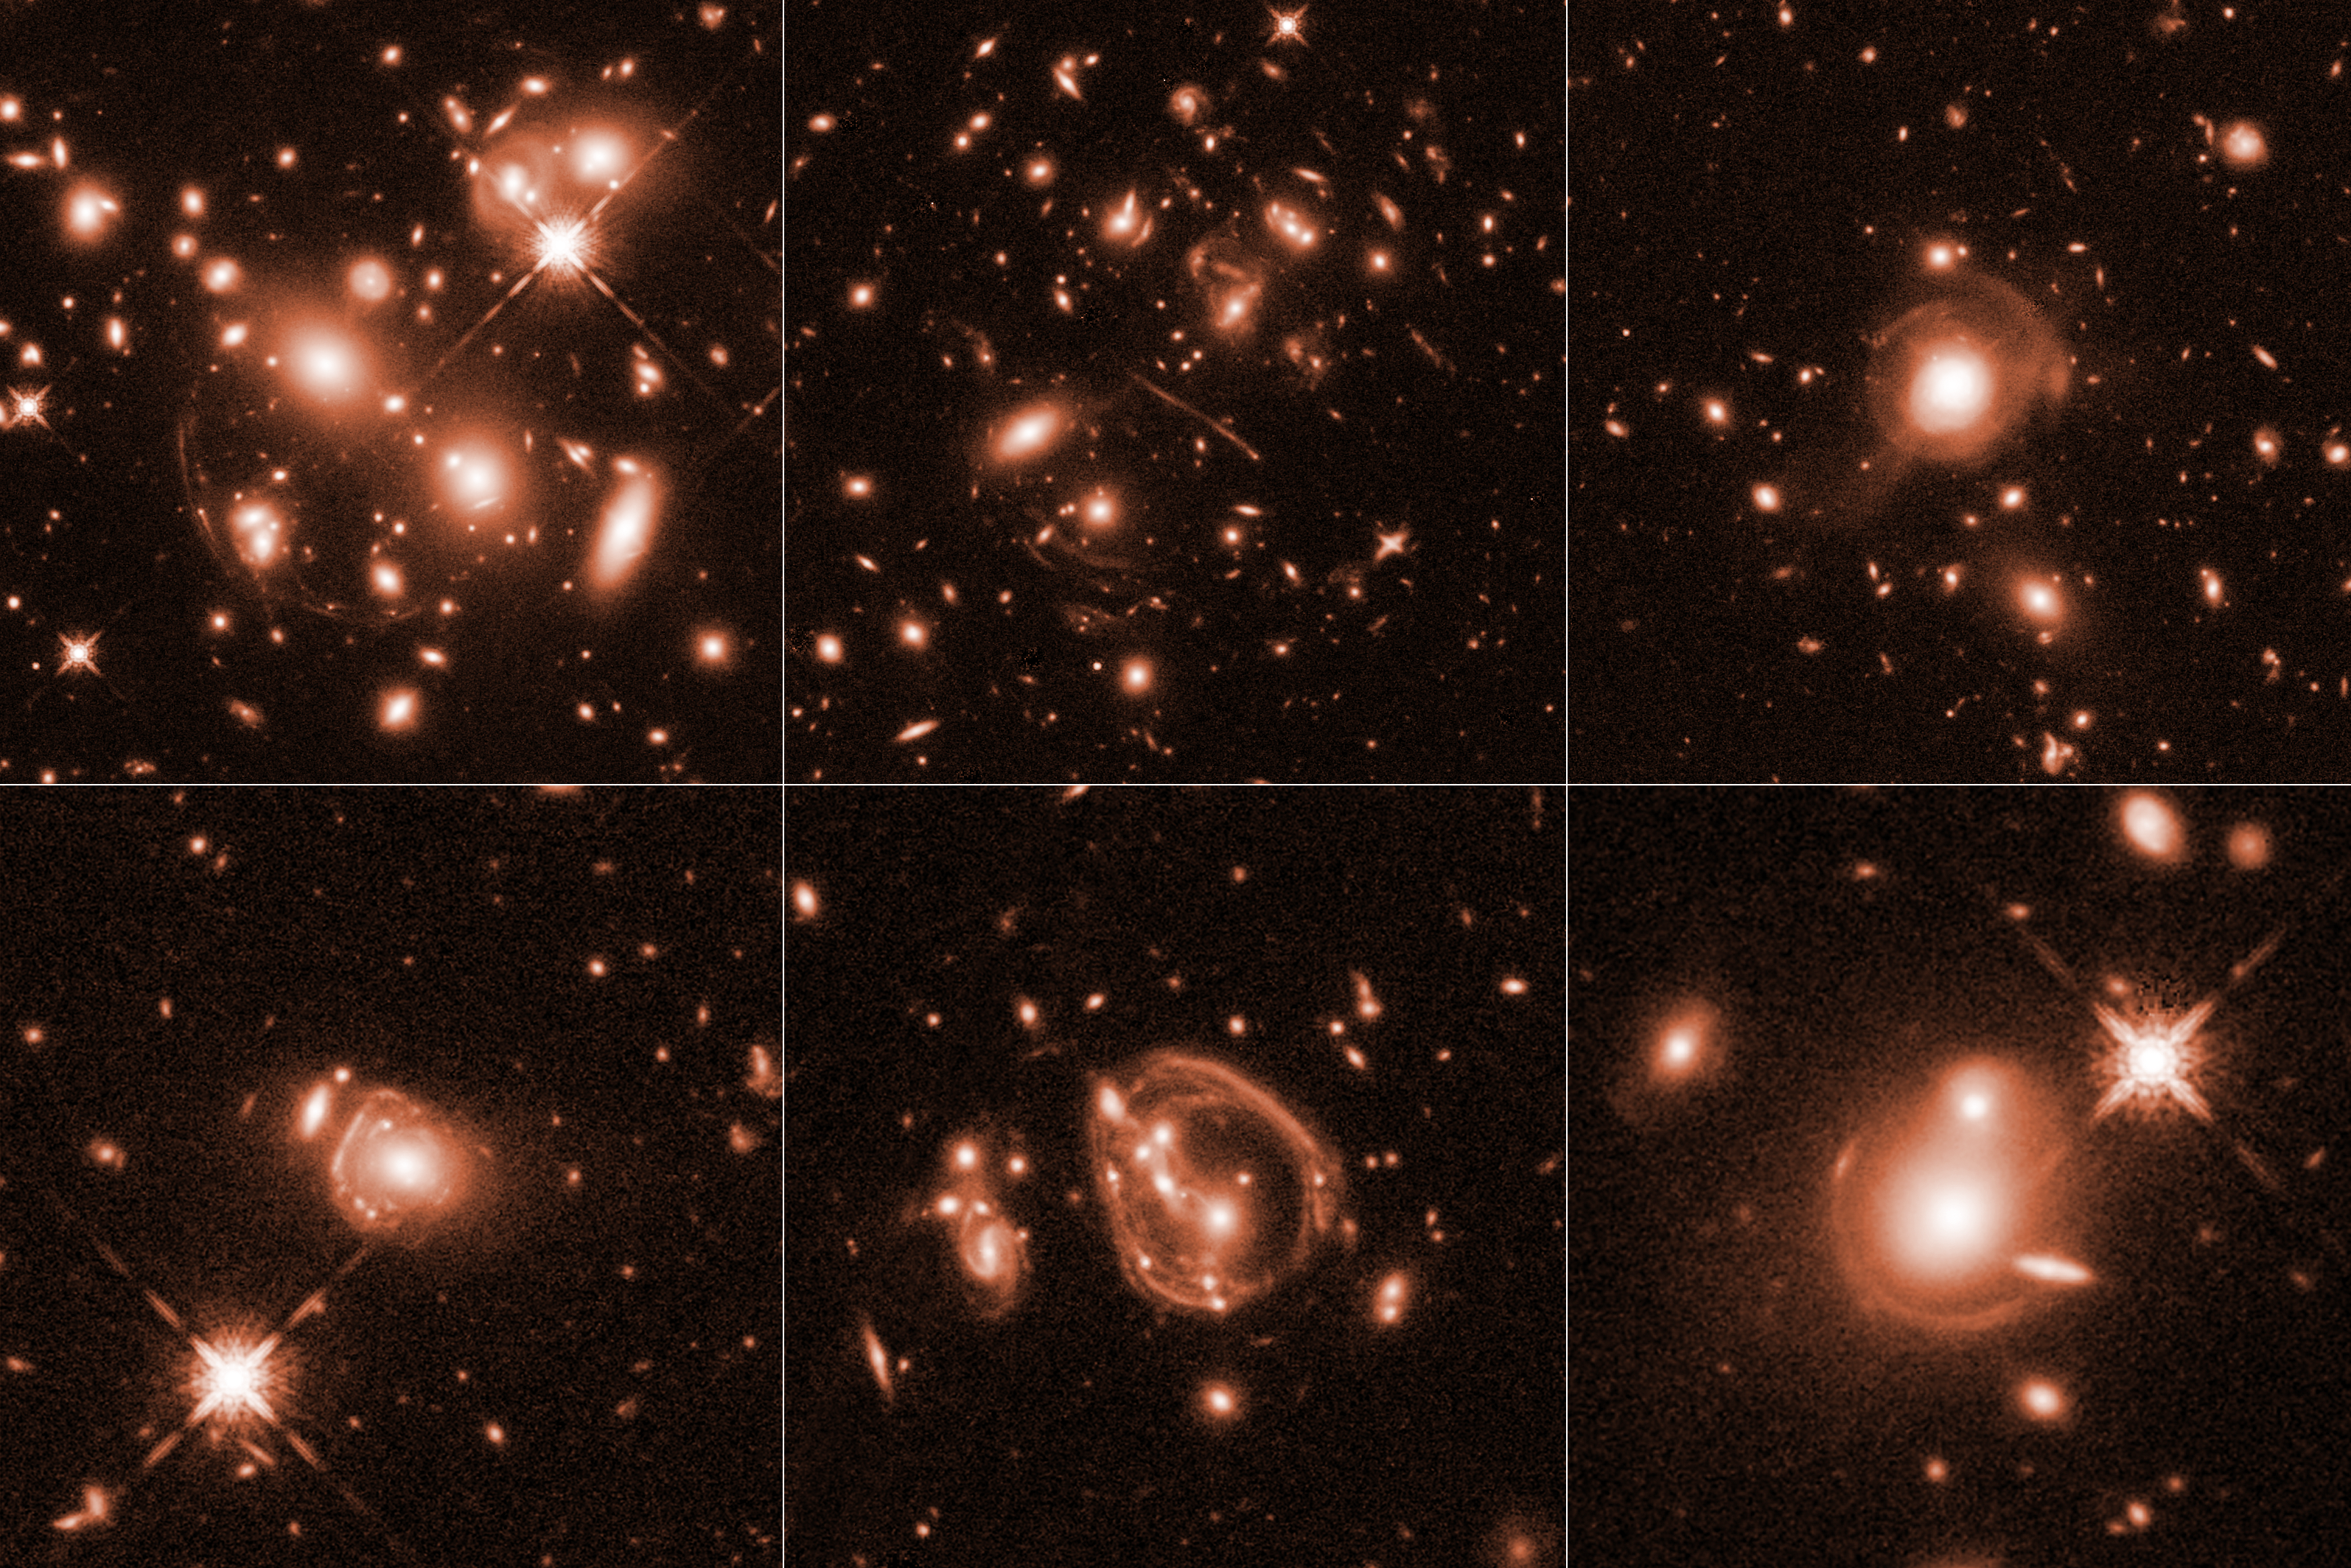

Hubble captures gallery of ultra-bright galaxies

These six images, taken by the NASA/ESA Hubble Space Telescope, reveal a jumble of misshapen-looking galaxies punctuated by exotic patterns such as arcs, streaks, and smeared rings. These unusual features are the stretched shapes of the brightest infrared galaxies in the Universe that are boosted by natural cosmic magnifying lenses. This effect, called gravitational lensing, occurs when the intense gravity of a massive galaxy or cluster of galaxies magnifies the light of more distant background sources.

The distant, lensed galaxies are as much as 10 000 times more luminous than our Milky Way. The lensing phenomenon allows for features as small as about 100 light-years or less across to be seen in the background galaxies.

The galaxies existed between 8 billion and 11.5 billion years ago, when the Universe was making stars more vigorously than it is today. The galaxies are ablaze with runaway star formation, creating more than 10 000 new stars a year. This star-birth frenzy creates lots of dust, which enshrouds the galaxies, making them too faint to detect in visible light. But they glow fiercely in infrared light, shining with the brilliance of 10 trillion to 100 trillion suns.

The infrared galaxies in these images are part of a Hubble survey of 22 distant ultra-luminous infrared galaxies that were found by ground- and space-based observatories. The images were taken in infrared light by Hubble's Wide Field Camera 3.

These results are not peer-reviewed and were presented at the 230th meeting of the AAS.

Credit: NASA, ESA, and J. Lowenthal (Smith College)